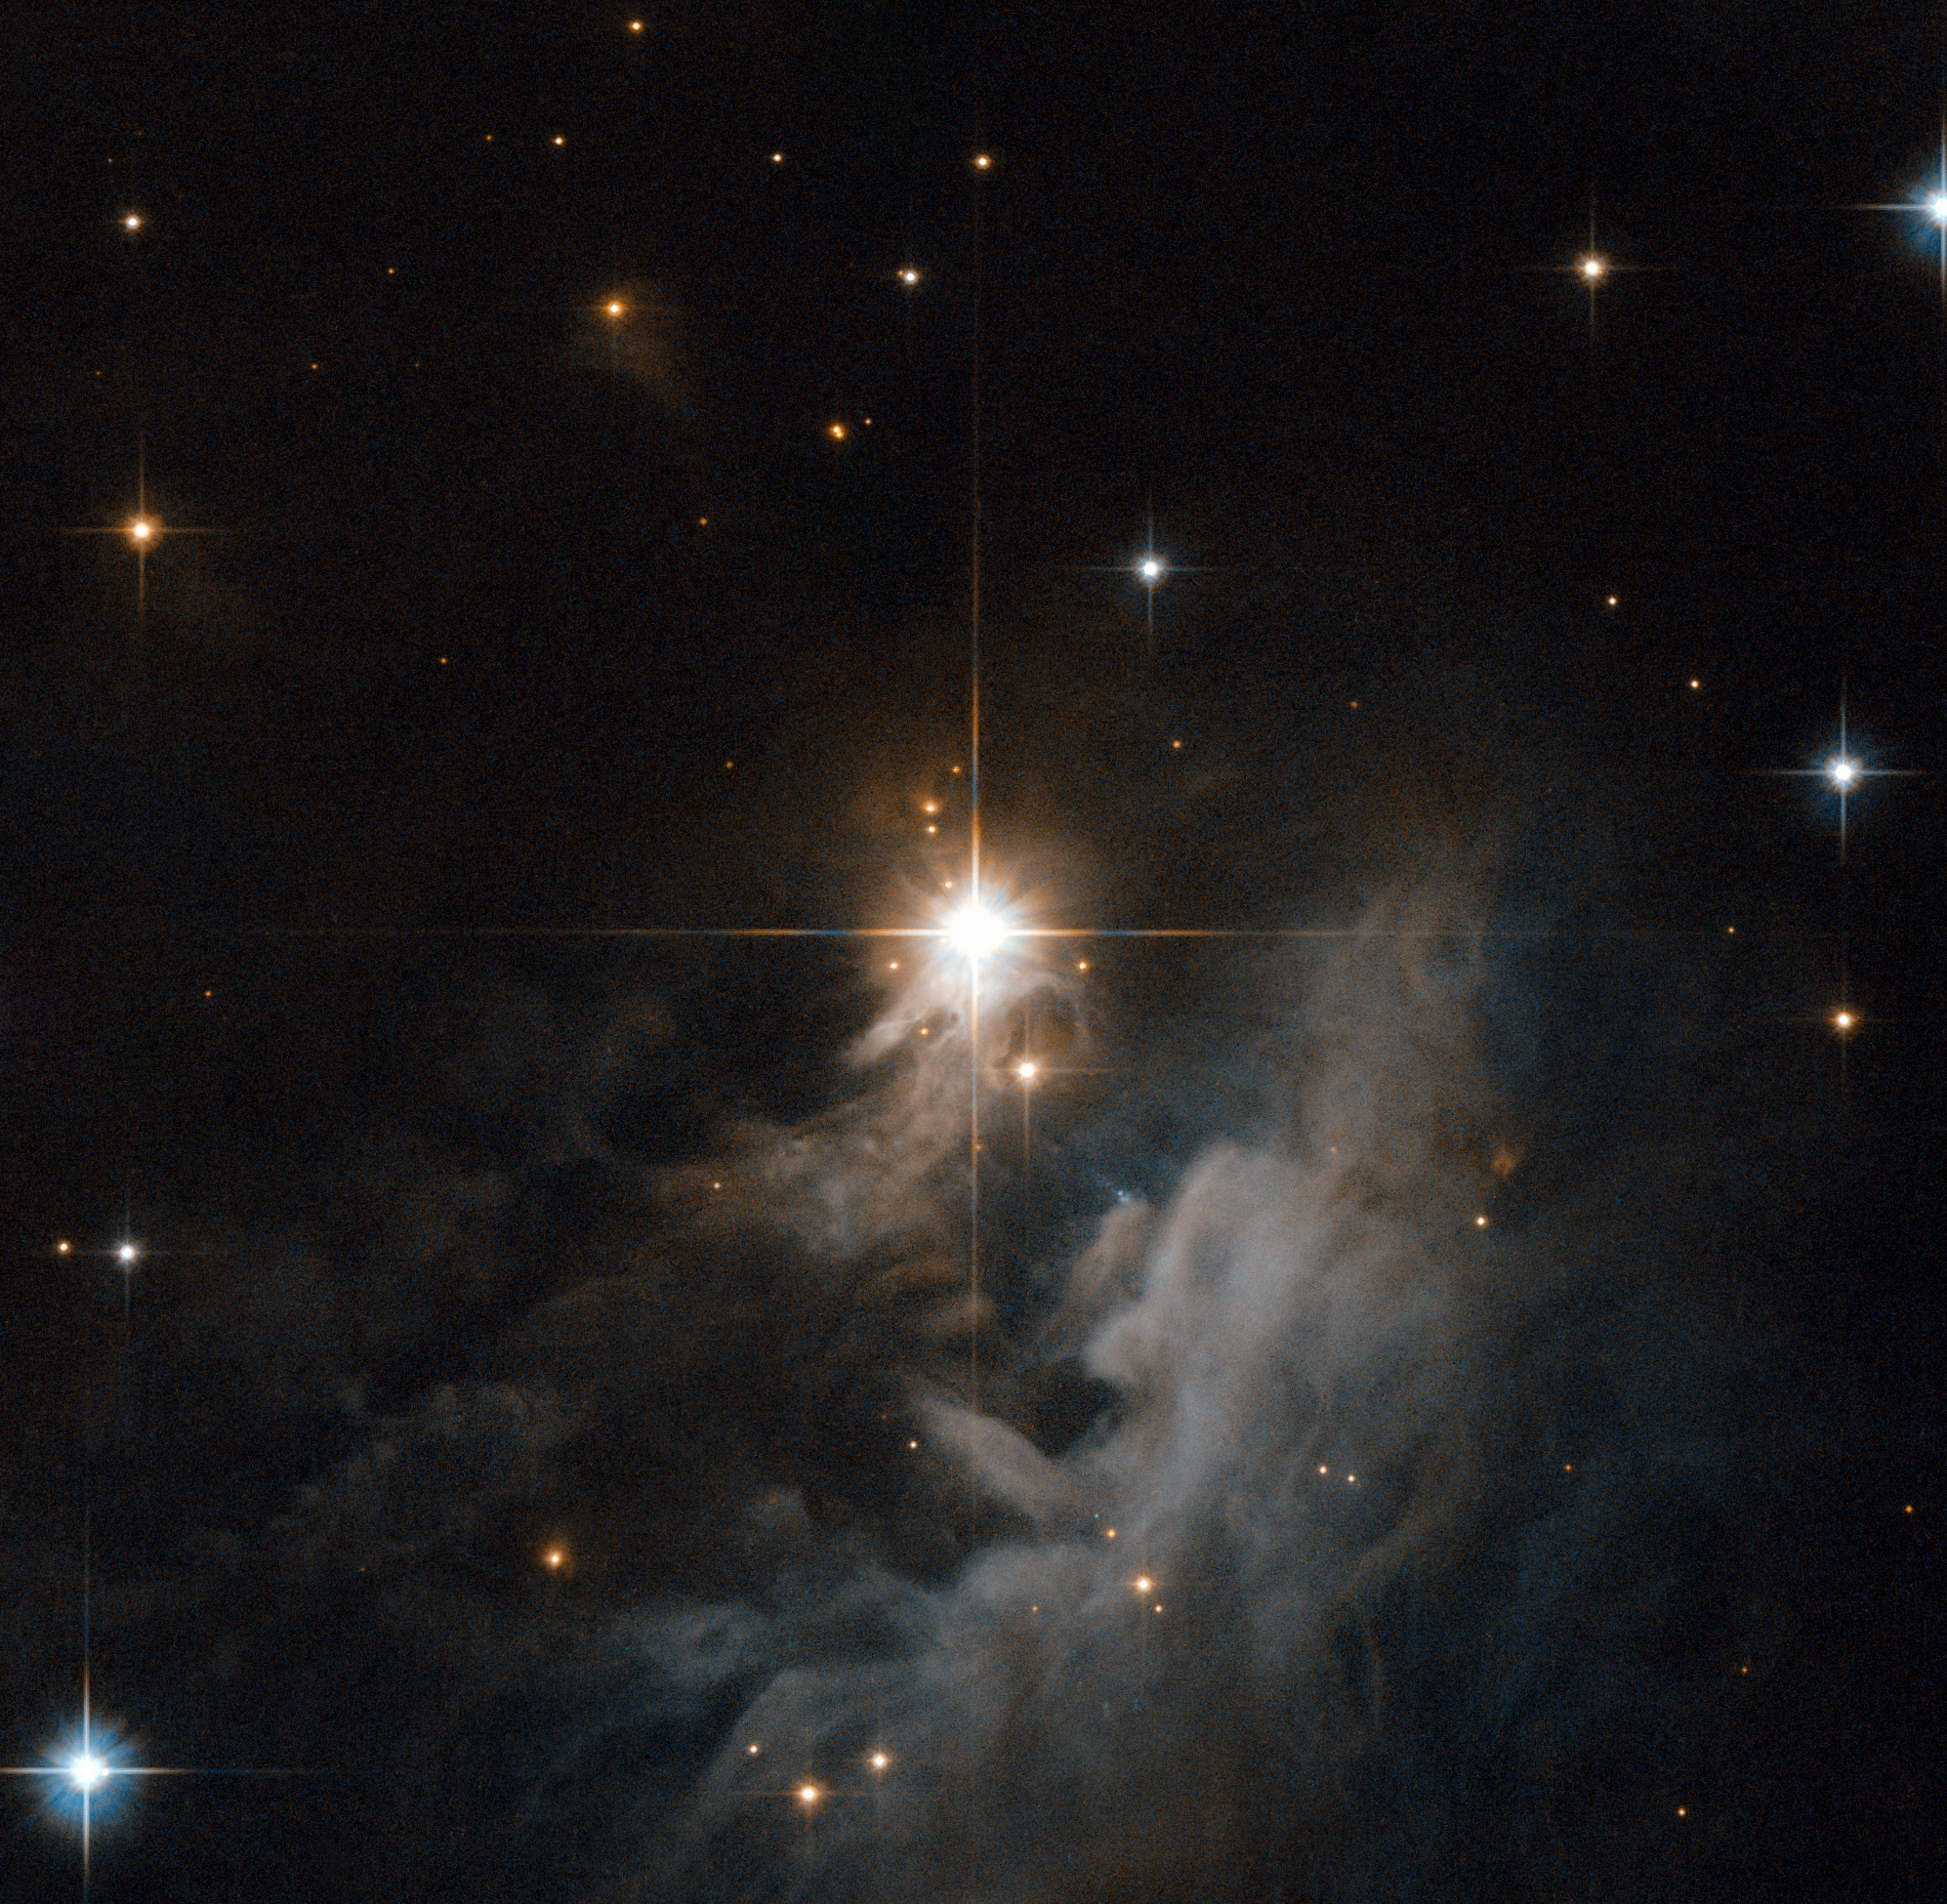

Looking to the heavens

The pearly wisps surrounding the central star IRAS 10082-5647 in this Hubble image certainly draw the eye towards the heavens. The divine-looking cloud is a reflection nebula, made up of gas and dust glowing softly by the reflected light of nearby stars, in this case a young Herbig Ae/Be star.

The star, like others of this type, is still a relative youngster, only a few million years old. It has not yet reached the so-called main sequence phase, where it will spend around 80% of its life creating energy by burning hydrogen in its core. Until then the star heats itself by gravitational collapse, as the material in the star falls in on itself, becoming ever denser and creating immense pressure which in turn gives off copious amounts of heat.

Stars only spend around 1% of their lives in this pre-main sequence phase. Eventually, gravitational collapse will heat the star’s core enough for hydrogen fusion to begin, propelling the star into the main sequence phase, and adulthood.

The Advanced Camera for Surveys aboard the Hubble Space Telescope captured the whorls and arcs of this nebula, lit up with the light from IRAS 10082-5647. Visible (555 nm) and near-infrared (814 nm) filters were used, coloured blue and red respectively. The field of view is around 1.3 by 1.3 arcminutes.

Credit: ESA/Hubble & NASA